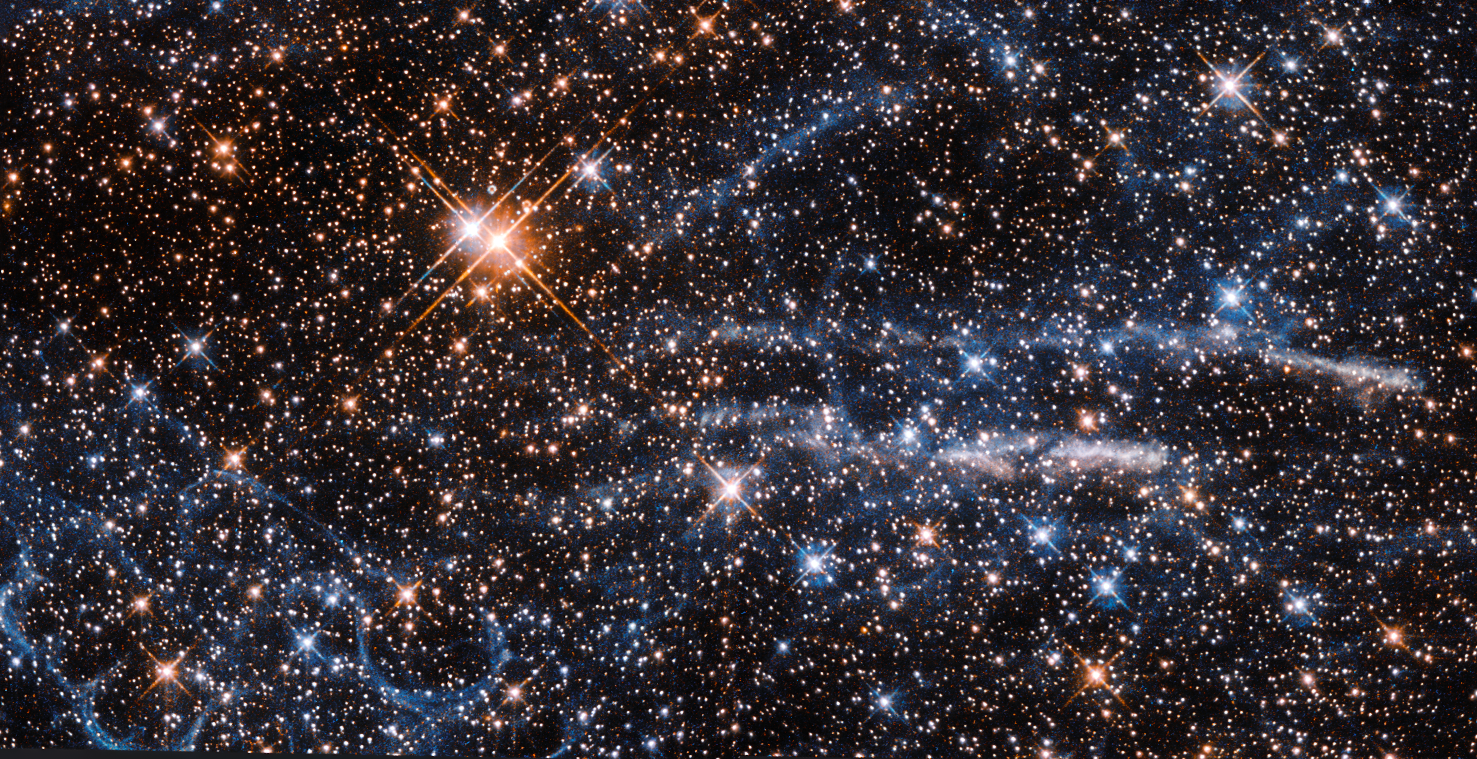

Bubbles in space

At a distance of just 160 000 light-years, the Large Magellanic Cloud (LMC) is one of the Milky Way’s closest companions. It is also home to one of the largest and most intense regions of active star formation known to exist anywhere in our galactic neighbourhood — the Tarantula Nebula. This NASA/ESA Hubble Space Telescope image shows both the spindly, spidery filaments of gas that inspired the region’s name, and the intriguing structure of stacked “bubbles” that forms the so-called Honeycomb Nebula (to the lower left).

The Honeycomb Nebula was found serendipitously by astronomers using ESO’s New Technology Telescope to image the nearby SN1987A, the closest observed supernova to Earth for over 400 years. The nebula’s strange bubble-like shape has baffled astronomers since its discovery in the early 1990s. Various theories have been proposed to explain its unique structure, some more exotic than others.

In 2010, a group of astronomers studied the nebula and, using advanced data analysis and computer modelling, came to the conclusion that its unique appearance is likely due to the combined effect of two supernovae — a more recent explosion has pierced the expanding shell of material created by an older explosion. The nebula’s especially striking appearance is suspected to be due to a fortuitous viewing angle; the honeycomb effect of the circular shells may not be visible from another viewpoint.

Credit: ESA/Hubble & NASA Acknowledgements: Judy Schmidt (Geckzilla)